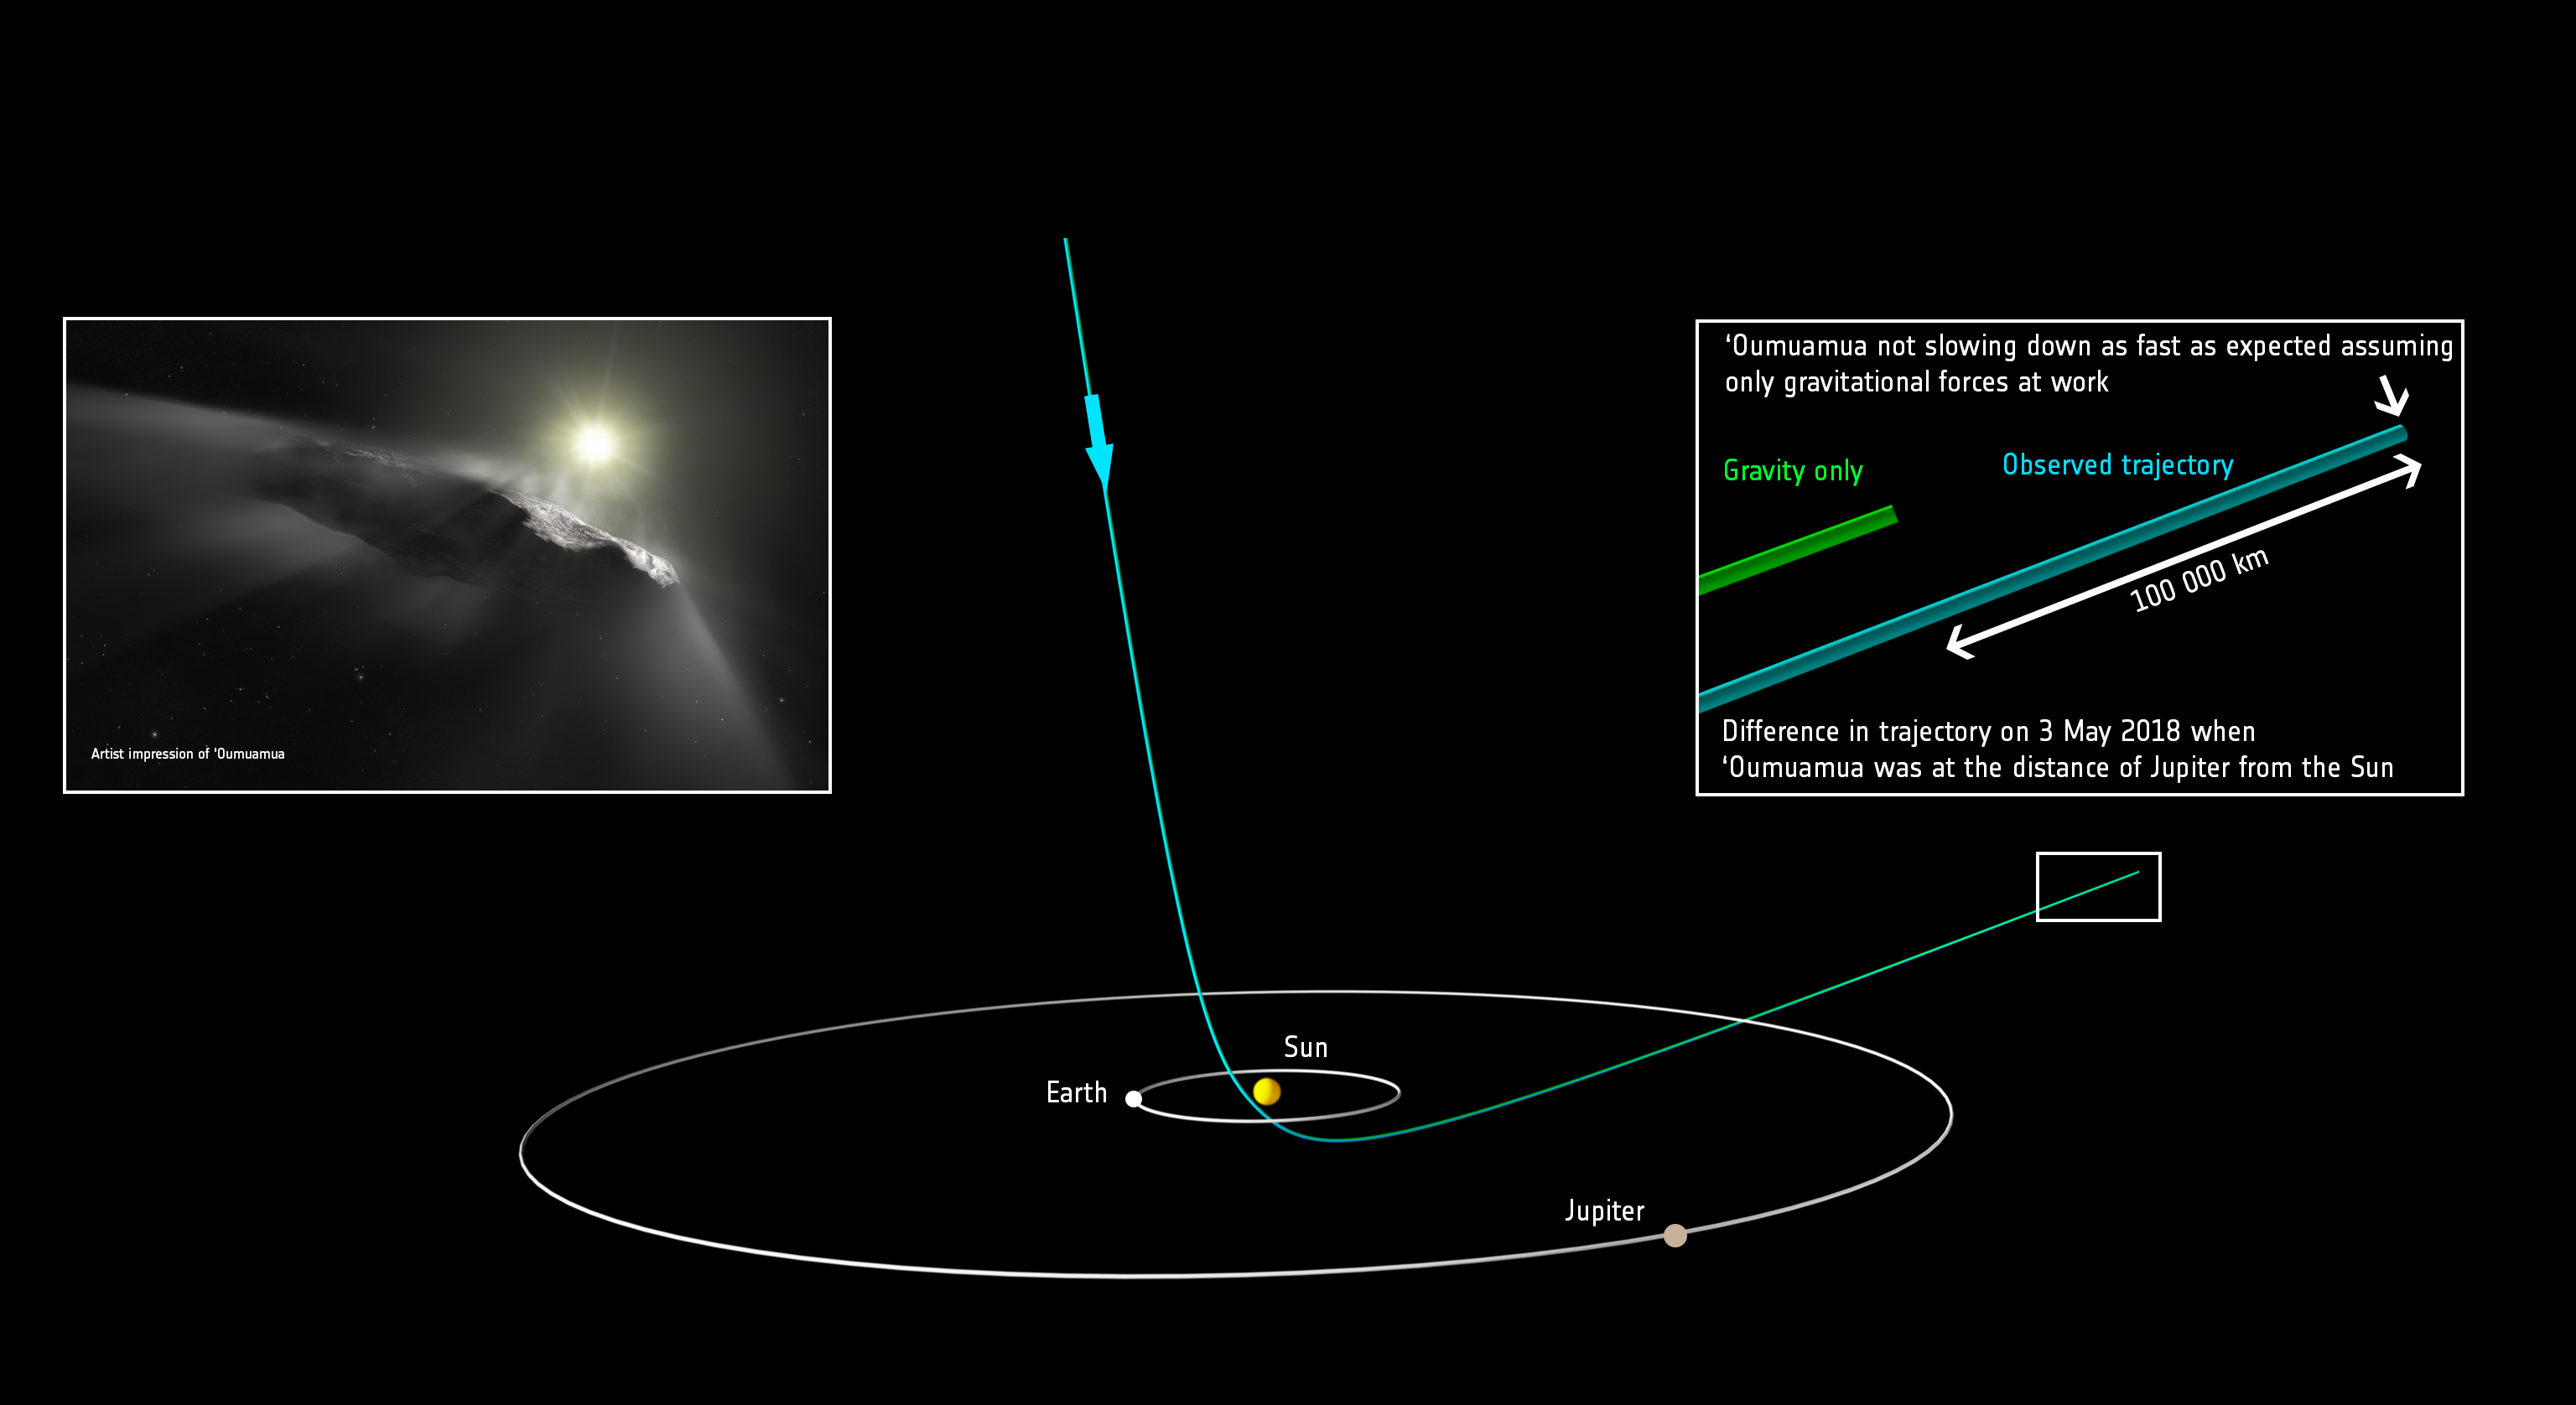

Predicted position of `Oumuamua versus observed position

This diagram shows the orbit of the interstellar object ‘Oumuamua as it passes through the Solar System. It shows the predicted path of ‘Oumuamua and the new course, taking the new measured velocity of the object into account.

‘Oumuamua passed the distance of Jupiter’s orbit in early May 2018 and will pass Saturn’s orbit January 2019. It will reach a distance corresponding to Uranus’ orbit in August 2020 and of Neptune in late June 2024. In late 2025 ‘Oumuamua will reach the outer edge of the Kuiper Belt, and then the heliopause — the edge of the Solar System — in November 2038.

Credit: ESA